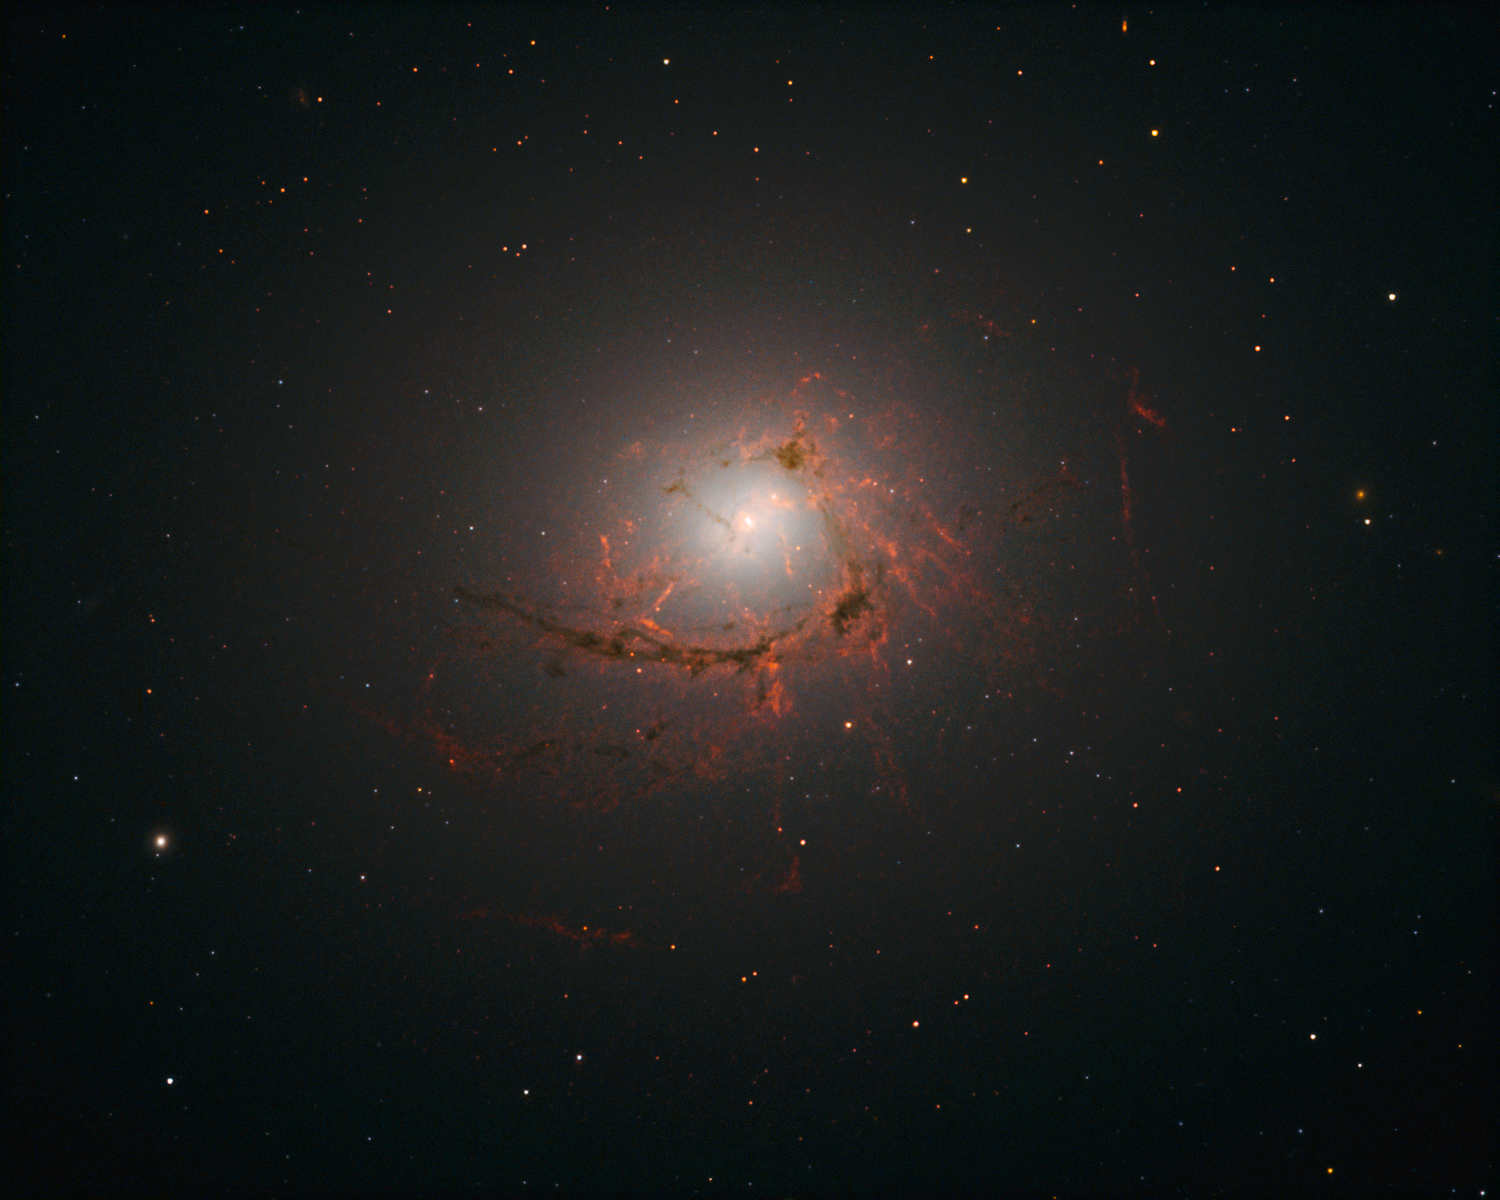

Dusty filaments in NGC 4696

This picture, taken by Hubble’s Wide Field Camera 3 (WFC3), shows NGC 4696, the largest galaxy in the Centaurus Cluster.

The new images taken with Hubble show the dusty filaments surrounding the centre of this huge galaxy in greater detail than ever before. These filaments loop and curl inwards in an intriguing spiral shape, swirling around the supermassive black hole at such a distance that they are dragged into and eventually consumed by the black hole itself.

Credit: NASA, ESA/Hubble, A. Fabian